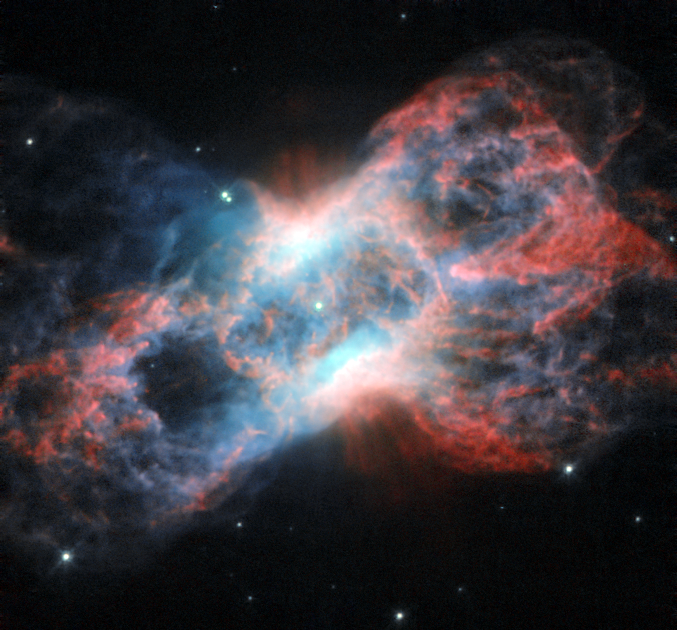

The swan and the butterfly

This image from the NASA/ESA Hubble Space Telescope shows NGC 7026, a planetary nebula. Located just beyond the tip of the tail of the constellation of Cygnus (The Swan), this butterfly-shaped cloud of glowing gas and dust is the wreckage of a star similar to the Sun.

Planetary nebulae, despite their name, have nothing to do with planets. They are in fact a relatively short-lived phenomenon that occurs at the end of the life of mid-sized stars. As a star’s source of nuclear fuel runs out, its outer layers are puffed out, leaving only the hot core of the star behind. As the gaseous envelope heats up, the atoms in it are excited, and it lights up like a fluorescent sign.

Fluorescent lights on Earth get their bright colours from the gases they are filled with. Neon signs, famously, produce a bright red colour, while ultraviolet lights (black lights) typically contain mercury. The same goes for nebulae: their vivid colours are produced by the mix of gases present in them.

This image of NGC 7026 shows starlight in green, light from glowing nitrogen gas in red, and light from oxygen in blue (in reality, this appears green, but the colour in this image has been shifted to increase the contrast).

As well as visible light, NGC 7026 emits X-ray radiation, and has been studied by ESA’s XMM-Newton space telescope. X-rays are a result of the extremely high temperatures of the gas in NGC 7026.

This image was produced by the Wide Field and Planetary Camera 2 aboard the Hubble Space Telescope. The image is 35 by 35 arcseconds.

A version of this image was entered into the Hubble’s Hidden Treasures Competition by contestant Linda Morgan-O'Connor. Hidden Treasures is an initiative to invite astronomy enthusiasts to search the Hubble archive for stunning images that have never been seen by the general public.

Credit: ESA/Hubble & NASA
Acknowledgement: Linda Morgan-O'Connor